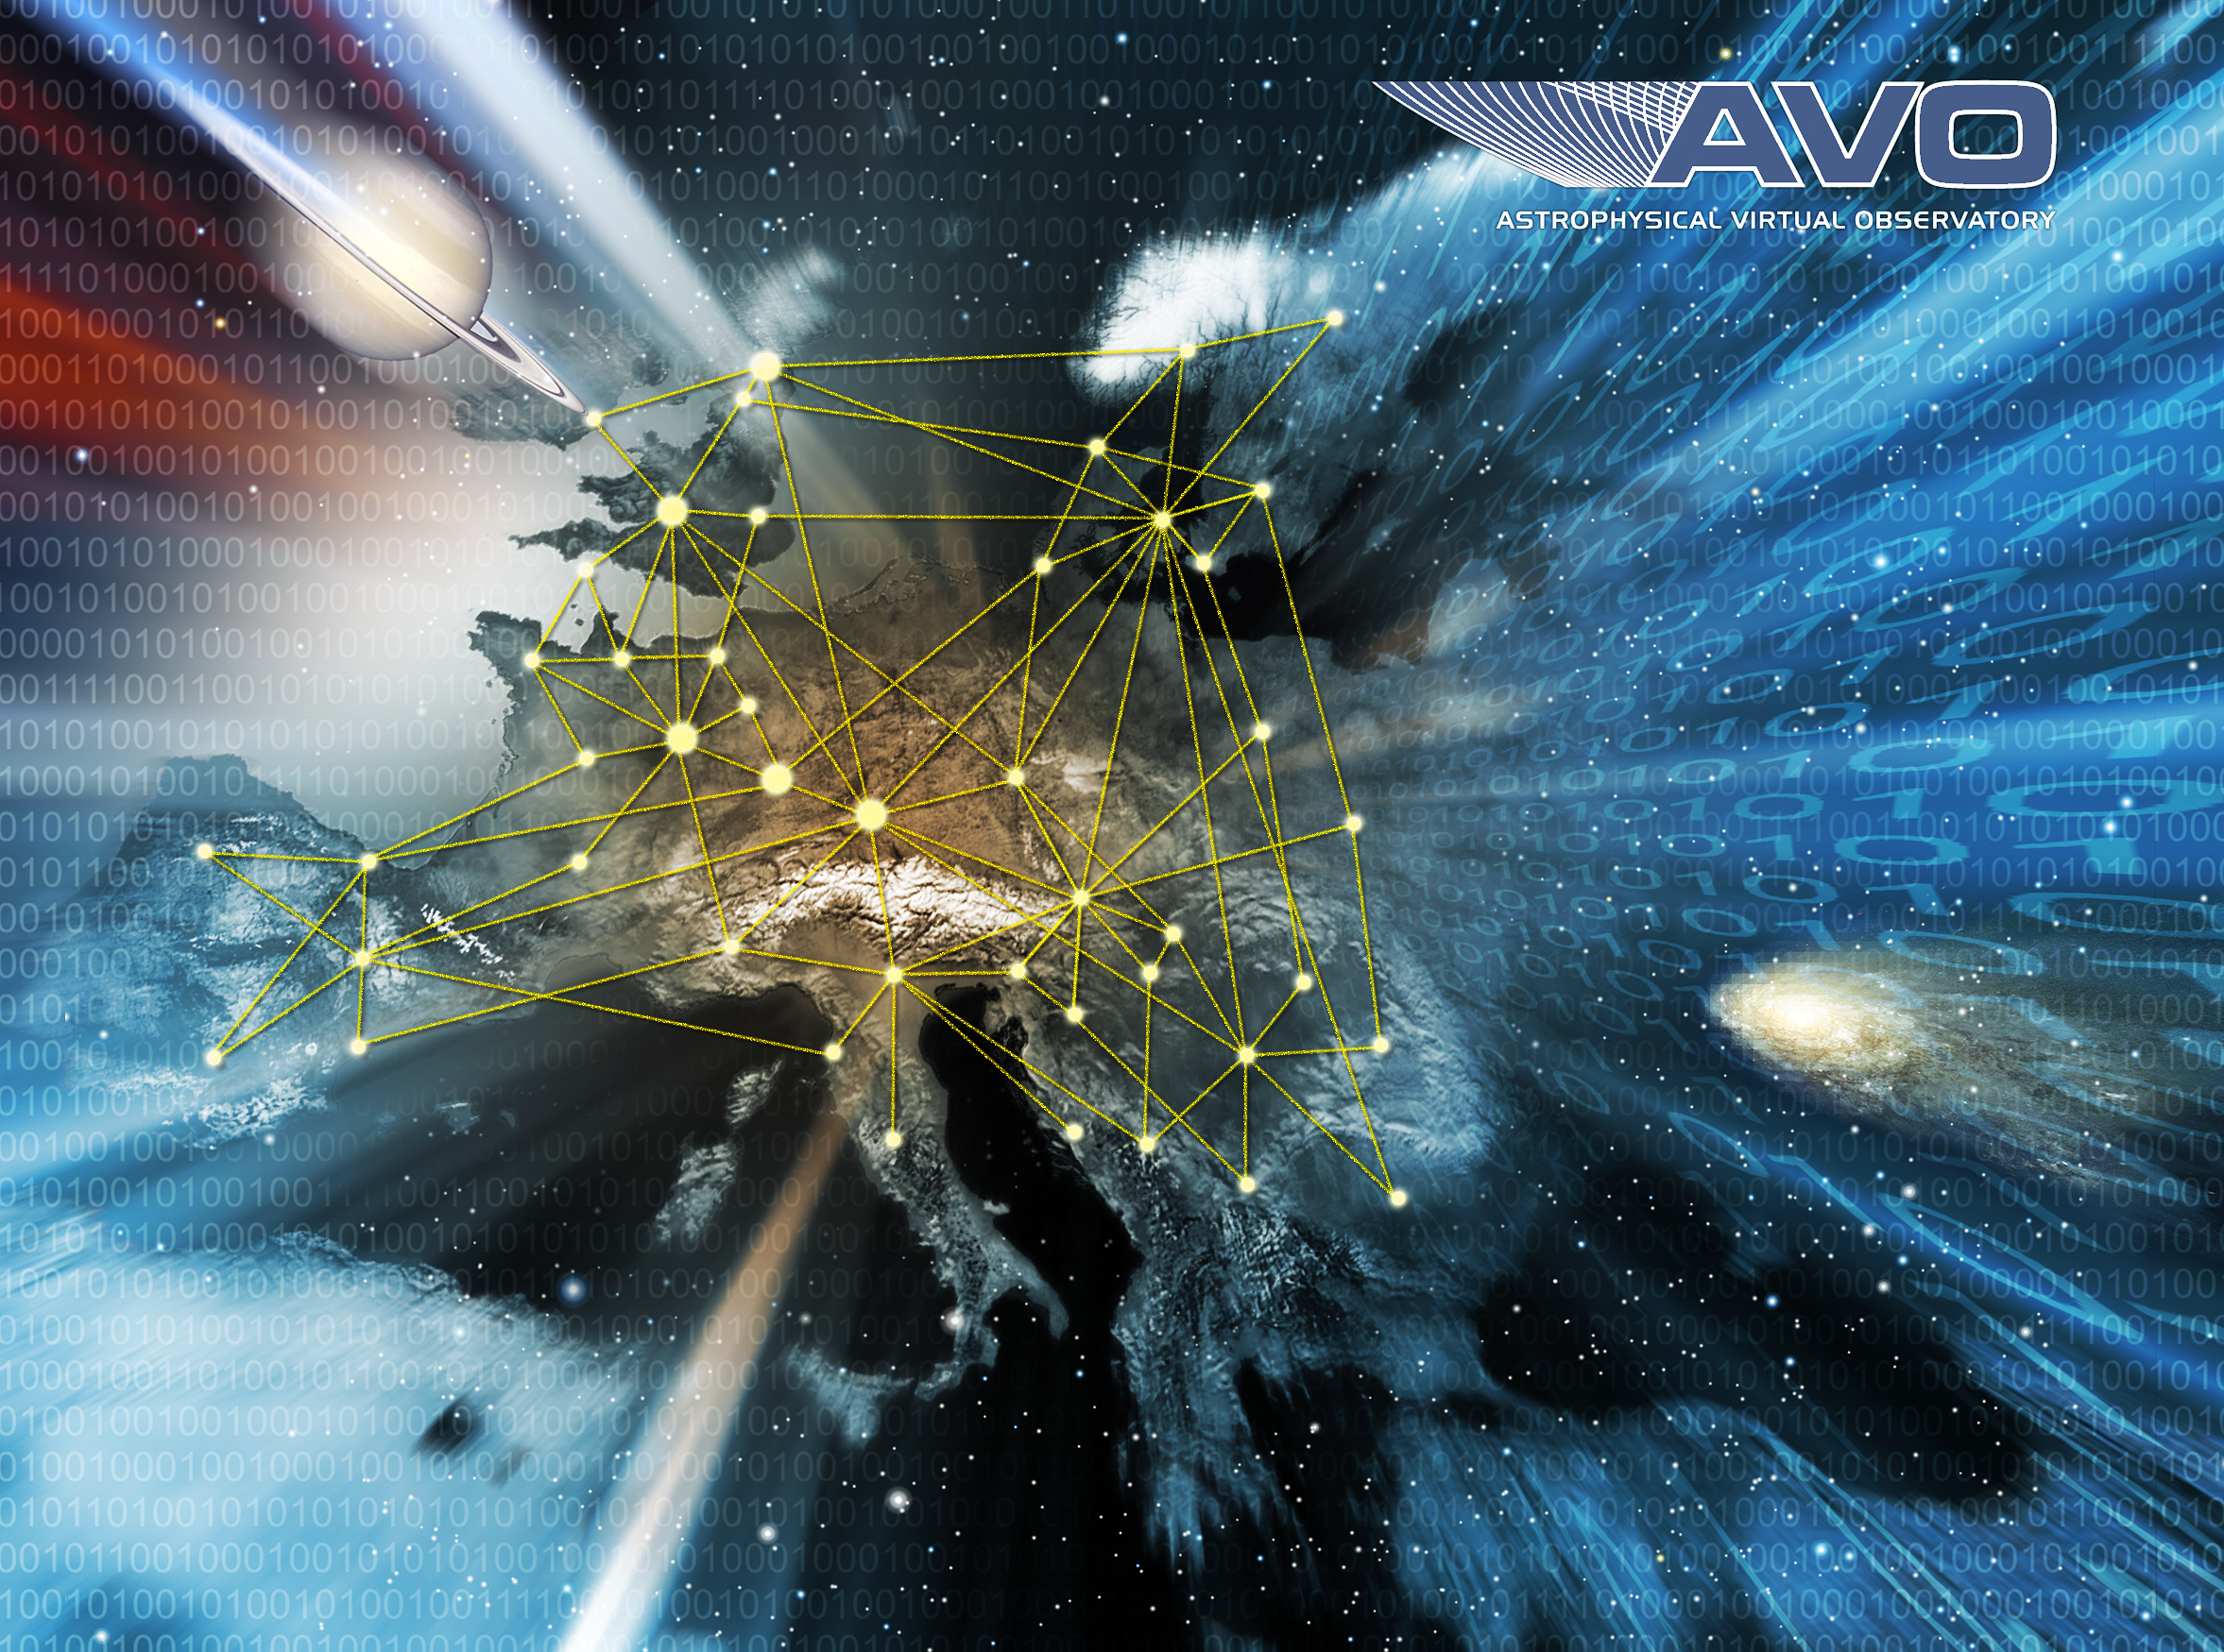

Exploring the digital Universe with Europe's Astrophysical Virtual Observatory

A new European initiative called the Astrophysical Virtual Observatory (AVO) is being launched to provide astronomers with a breathtaking potential for new discoveries. It will enable them to seamlessly combine the data from both ground- and space-based telescopes which are making observations of the Universe across the whole range of wavelengths - from high-energy gamma rays through the ultraviolet and visible to the infrared and radio.

Credit: ESO, ESA, ASTROGRID, CDS (CNRS/ULP), TERAPIX (CNRS) and Jodrell Bank Observatory